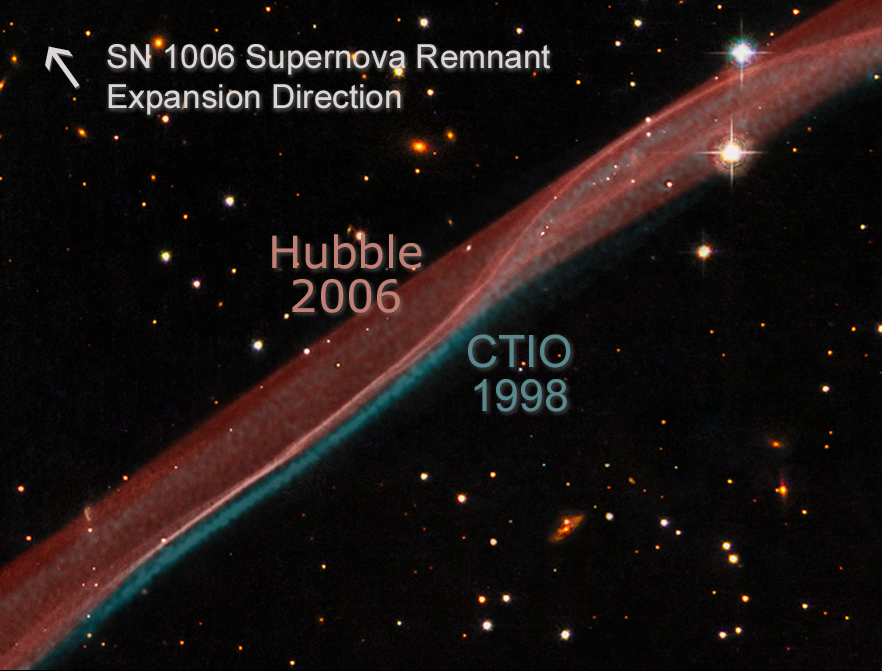

SN 1006 Supernova remnant expansion comparison

Comparison of visible hydrogen emission in the NW filament of SN 1006 in data taken at the CTIO Curtis-Schmidt H-alpha, continuum-subtracted (Winkler, et al.) in 1998 (shown in green), and the Hubble ACS data (Raymond et. al) in 2006 (shown in red). The stellar background is from WFPC2 broadband B, V, and I data from 2008 (Hubble Heritage Team).

Credit: NASA, ESA, and L. Frattare (STScI). Science Credit: Hubble data: NASA, ESA, and the Hubble Heritage Team (STScI/AURA); CTIO data: Winkler/CTIO/NOAO/AURA